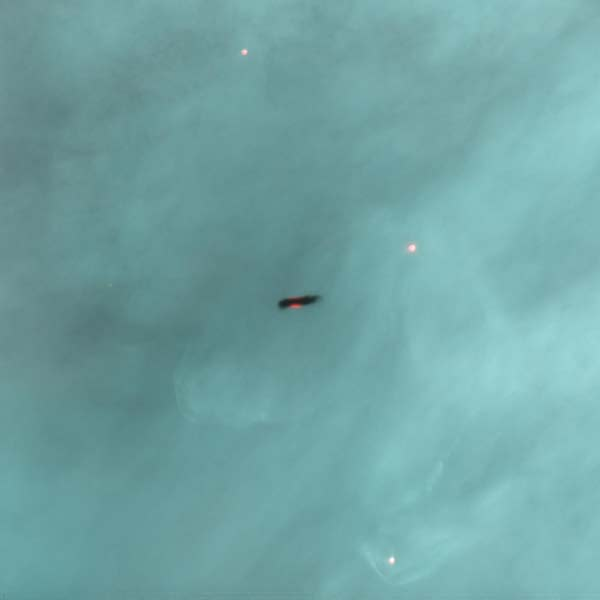

Proplyd in the Orion Nebula

A protoplanetary disk seen in silhouette against the Orion Nebula.

Credit: J. Bally (University of Colorado) and H. Throop (SWRI)